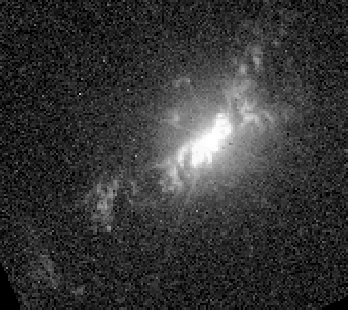

Fireworks near Galaxy NGC 4151 (WFPC-2)

A Hubble Wide Field Planetary Camera 2 image of the oxygen emission (5007 Angstroms) from the gas at the heart of NGC 4151. Though the twin cone structure can be seen, the image does not provide any information about the motion of the oxygen gas.

Credit: John Hutchings (Dominion Astrophysical Observatory), Bruce Woodgate (GSFC/NASA/ESA), Mary Beth Kaiser (Johns Hopkins University), Steven Kraemer(Catholic University of America), and the STIS Team